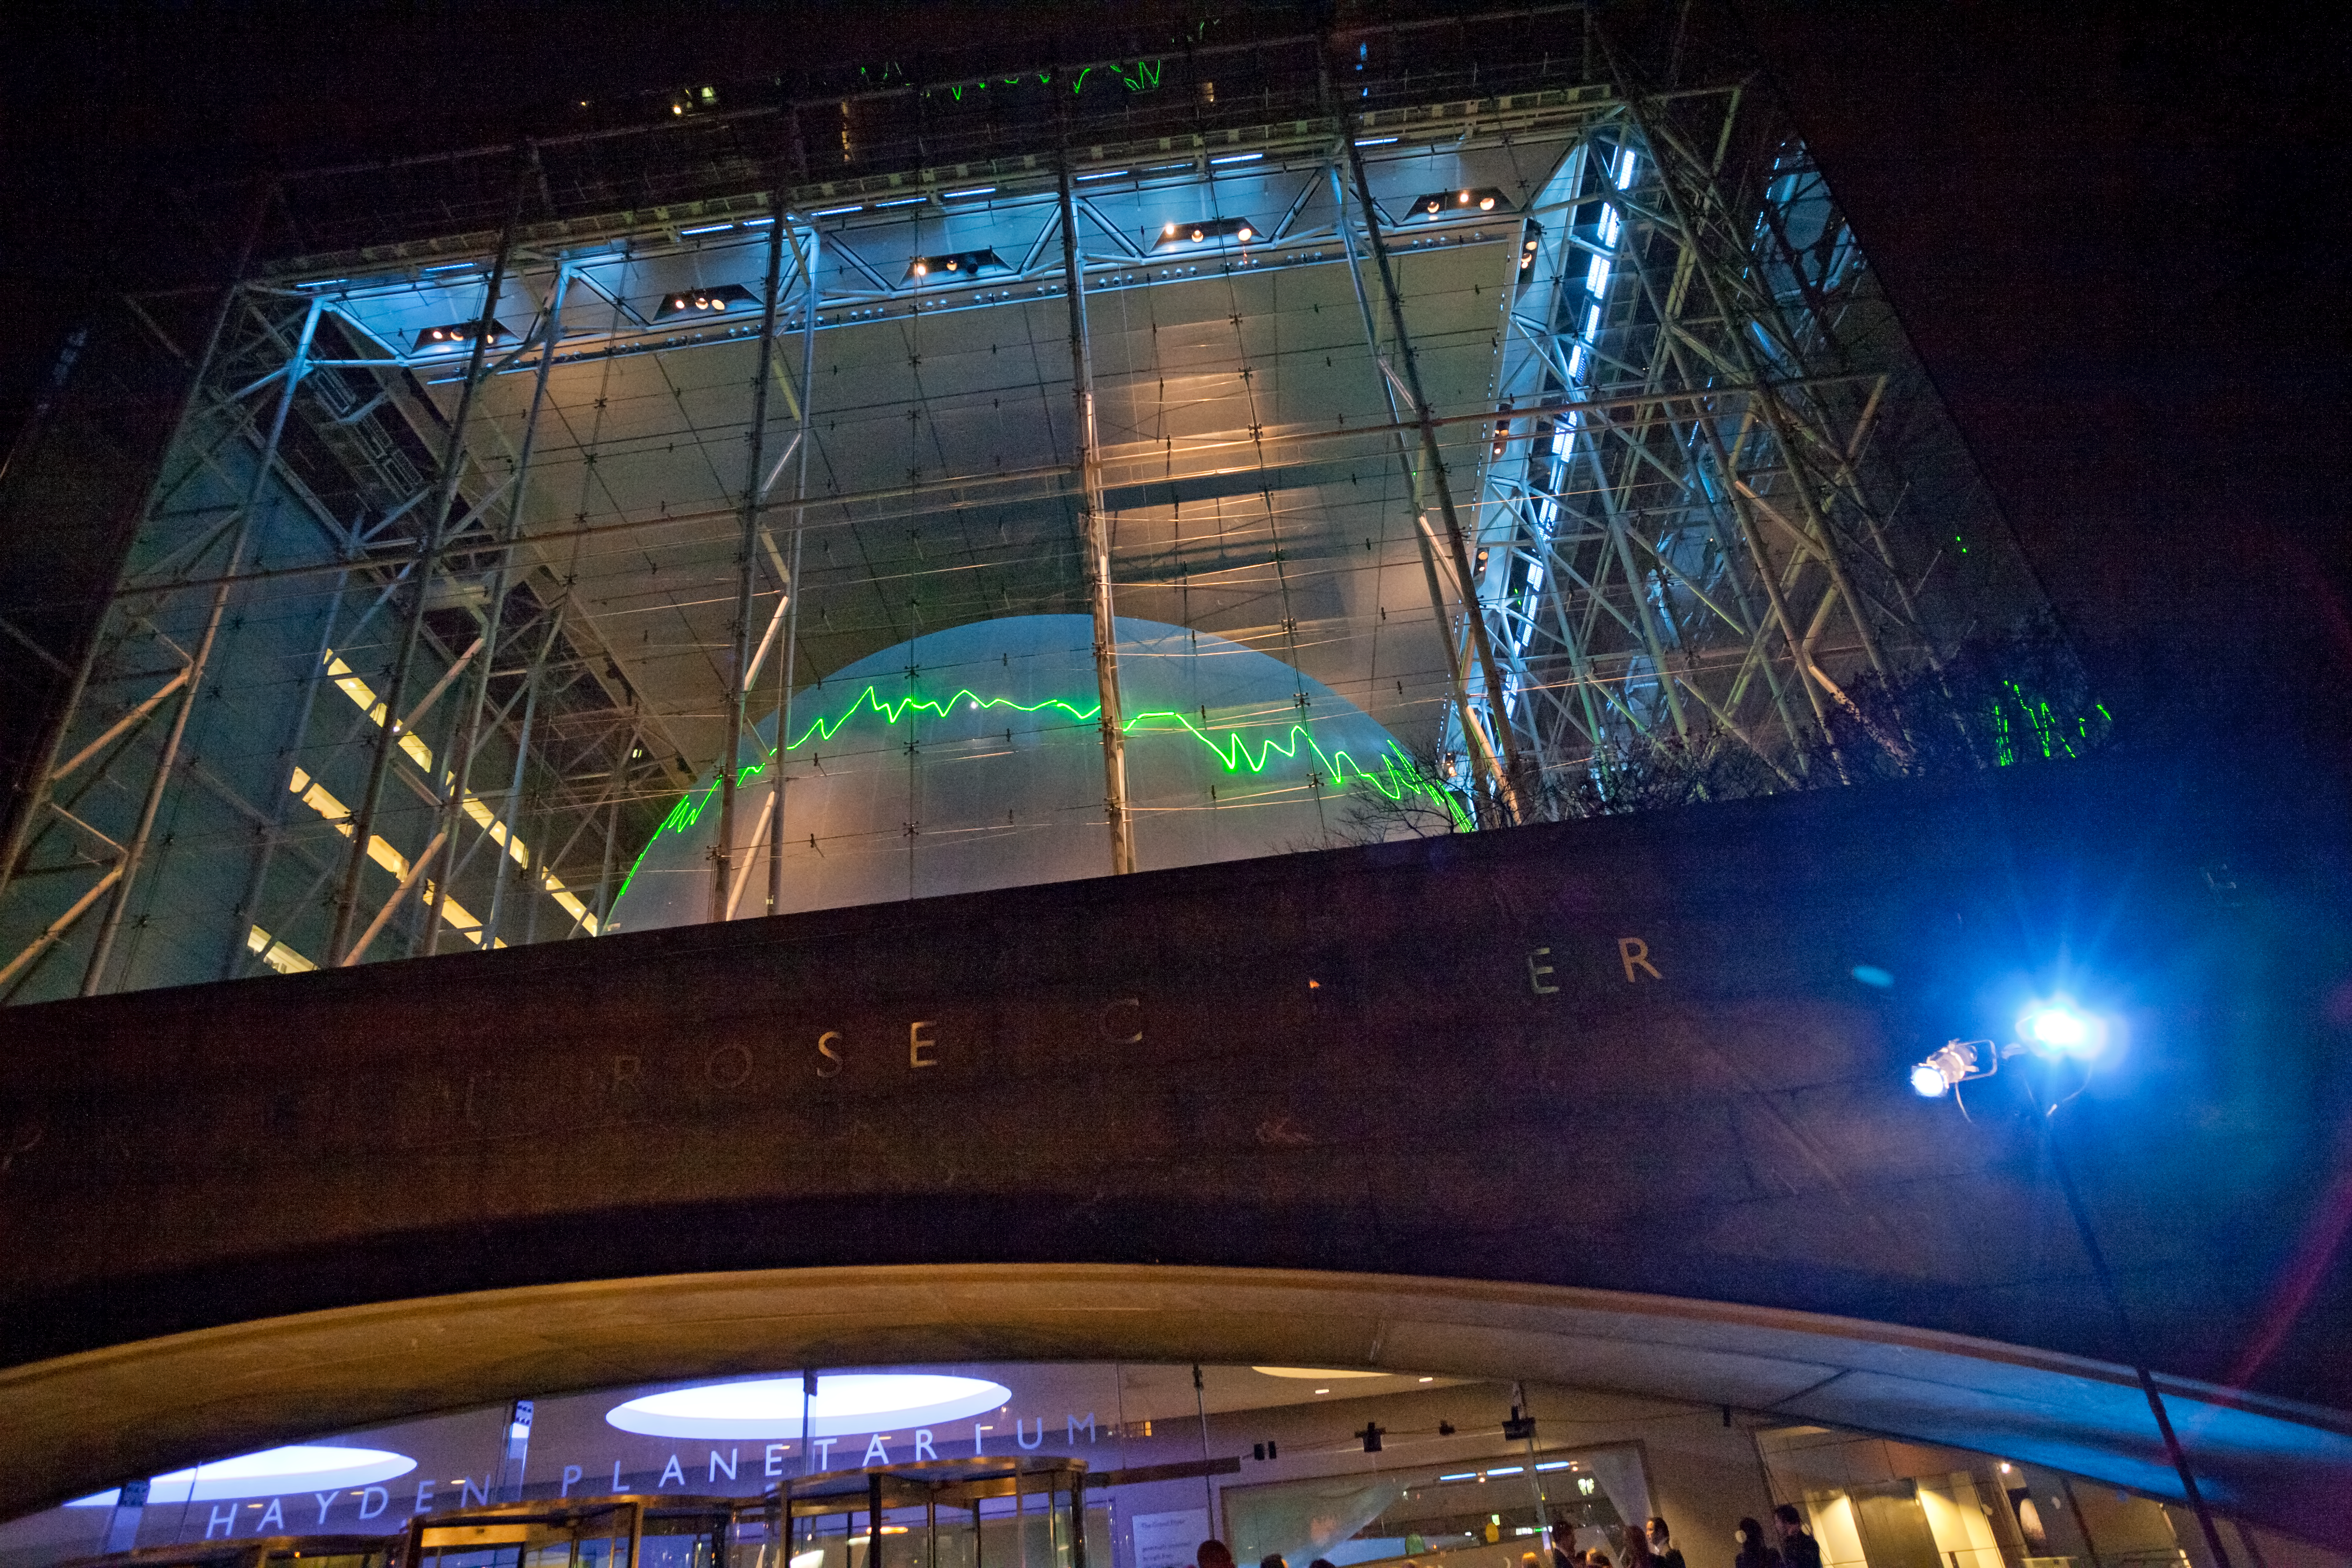

From the distant past

This image shows From the Distant Past, a laser installation by German conceptual artist Tim Otto Roth, as it is projected onto the dome of New York’s Hayden Planetarium. The installation shows spectra (graphs that represent the brightness and colours of astronomical objects) collected by the NASA/ESA Hubble Space Telescope, projected using a green scanning laser. These spectra include data from distant galaxies whose light has taken billions of years to reach us.

Credit: ESA/Hubble, AMNH